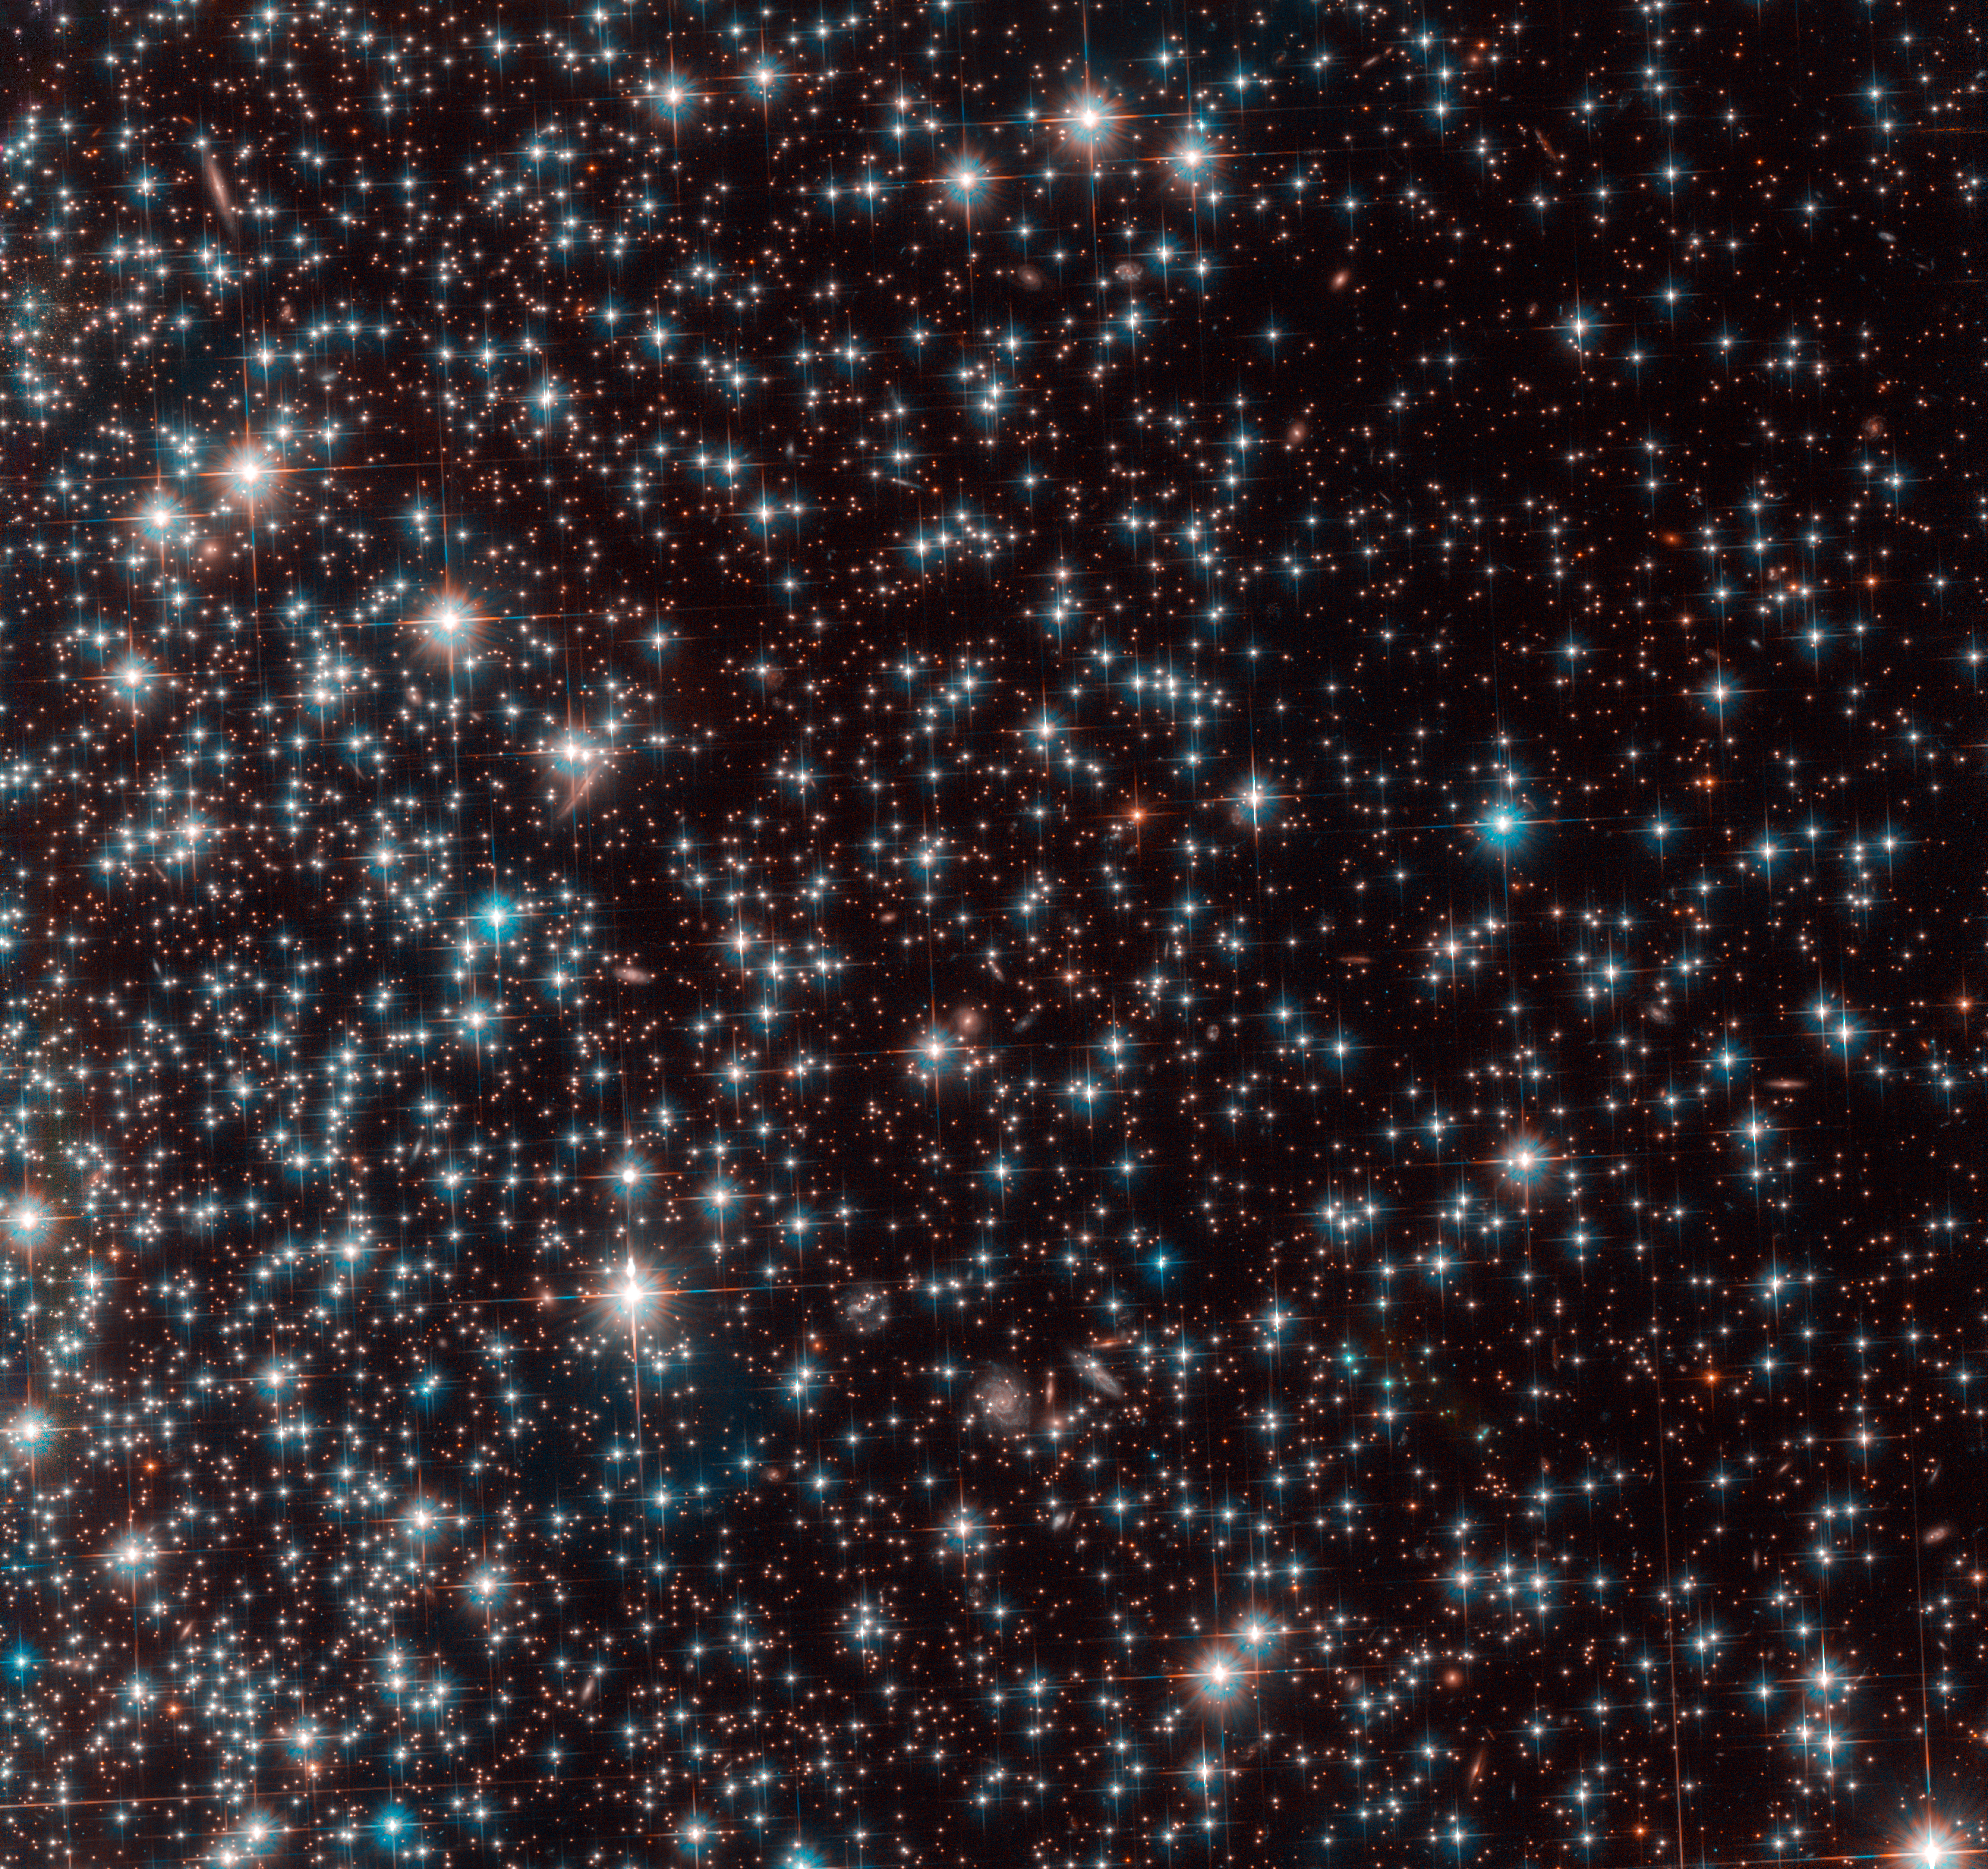

Globular cluster NGC 6752

This image, taken with the NASA/ESA Hubble Space Telescope, shows a part of the globular cluster NGC 6752. The observations were made to study white dwarfs within it and to use these stars to measure the age of the globular cluster.

Analysing the data, astronomers discovered a previously unknown galaxy behind the globular cluster. The galaxy, nicknamed Bedin 1, is visible as a collection of faint stars at the top left of the image.

Credit: ESA/Hubble, NASA, Bedin et al.